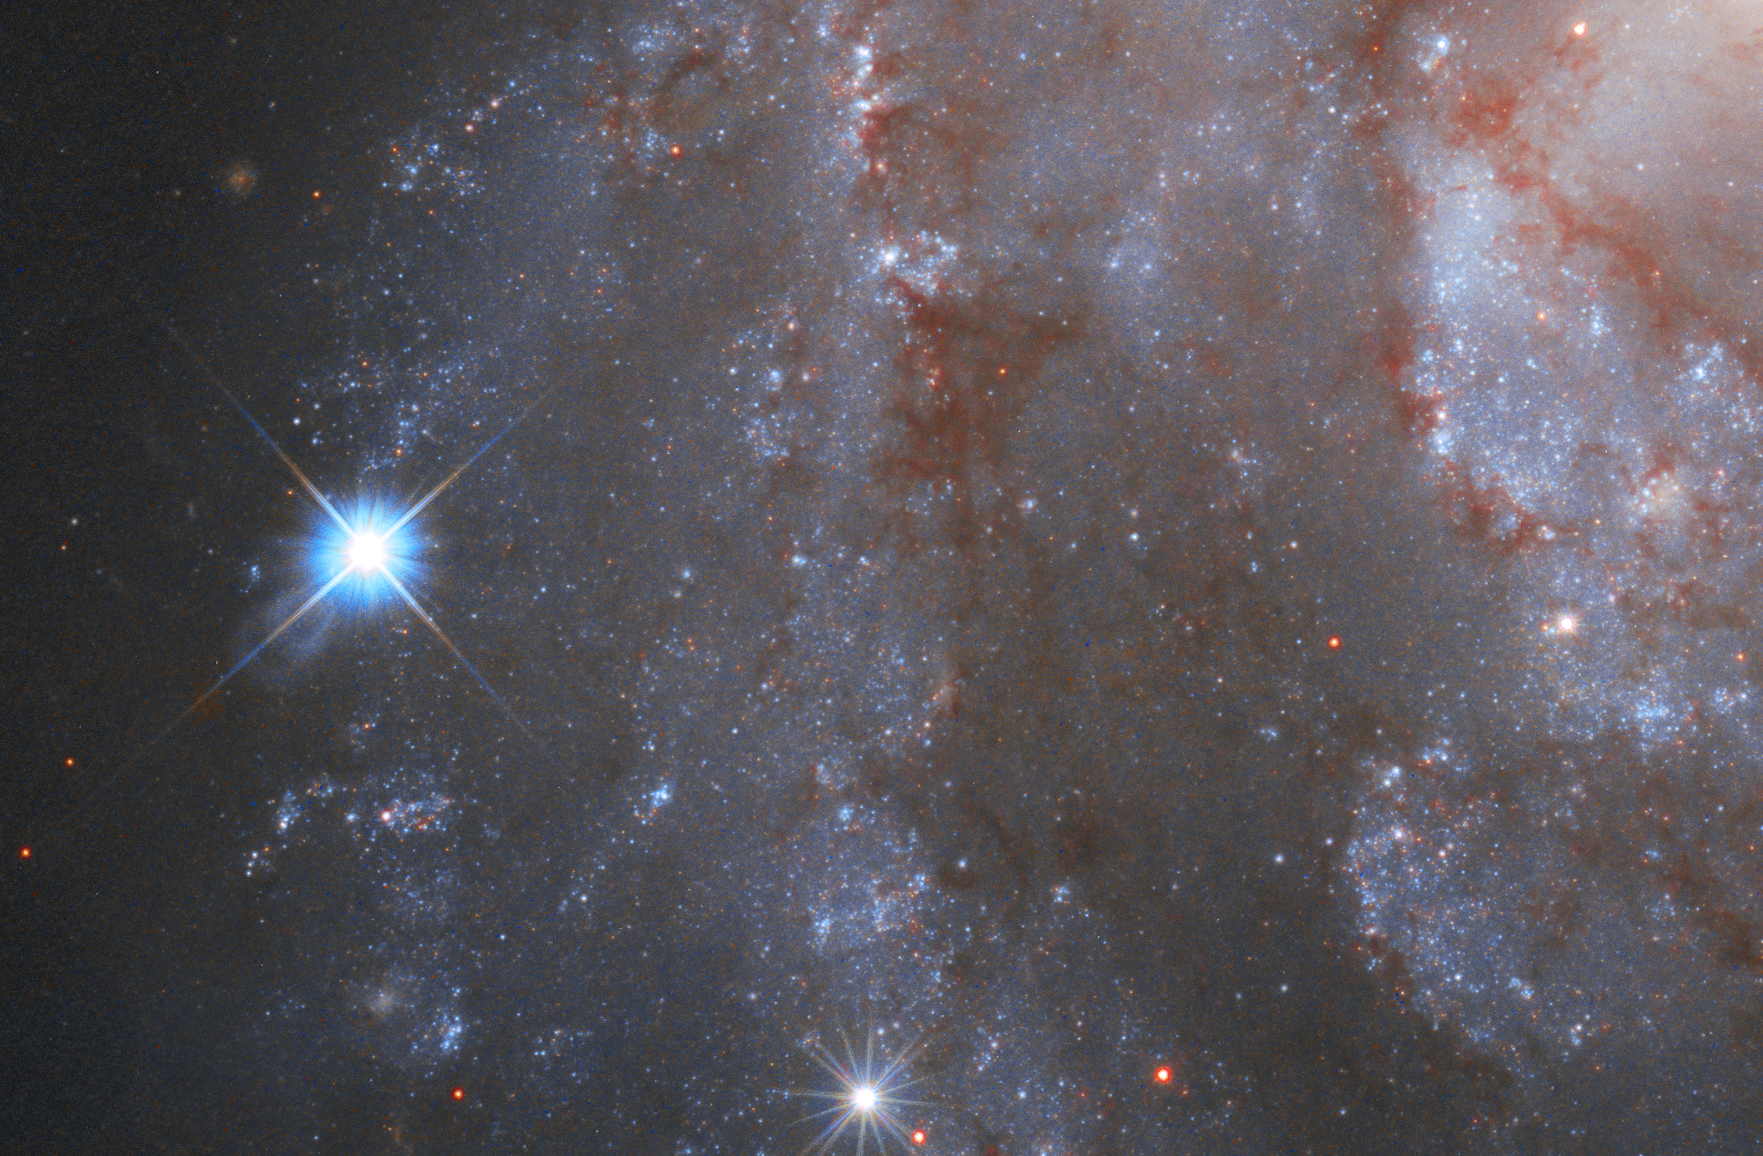

Hubble Captures Supernova in NGC 2525

Pictured here is part of the captivating galaxy NGC 2525. Located nearly 70 million light-years from Earth, this galaxy is part of the constellation of Puppis in the southern hemisphere. Together with the Carina and the Vela constellations, it makes up an image of the Argo from ancient greek mythology.

On the left, a brilliant supernova is clearly visible in the image. The supernova is formally known as SN2018gv and was first spotted in mid-January 2018. The NASA/ESA Hubble Space Telescope captured the supernova in NGC 2525 as part of one of its major investigations; measuring the expansion rate of the Universe, which can help answer fundamental questions about our Universe’s very nature. Supernovae like this one can be used as cosmic tape measures, allowing astronomers to calculate the distance to their galaxies.

ESA/Hubble has now published a unique time-lapse of this galaxy and it’s fading supernova.

Credit: ESA/Hubble & NASA, A. Riess and the SH0ES team Acknowledgment: Mahdi Zamani